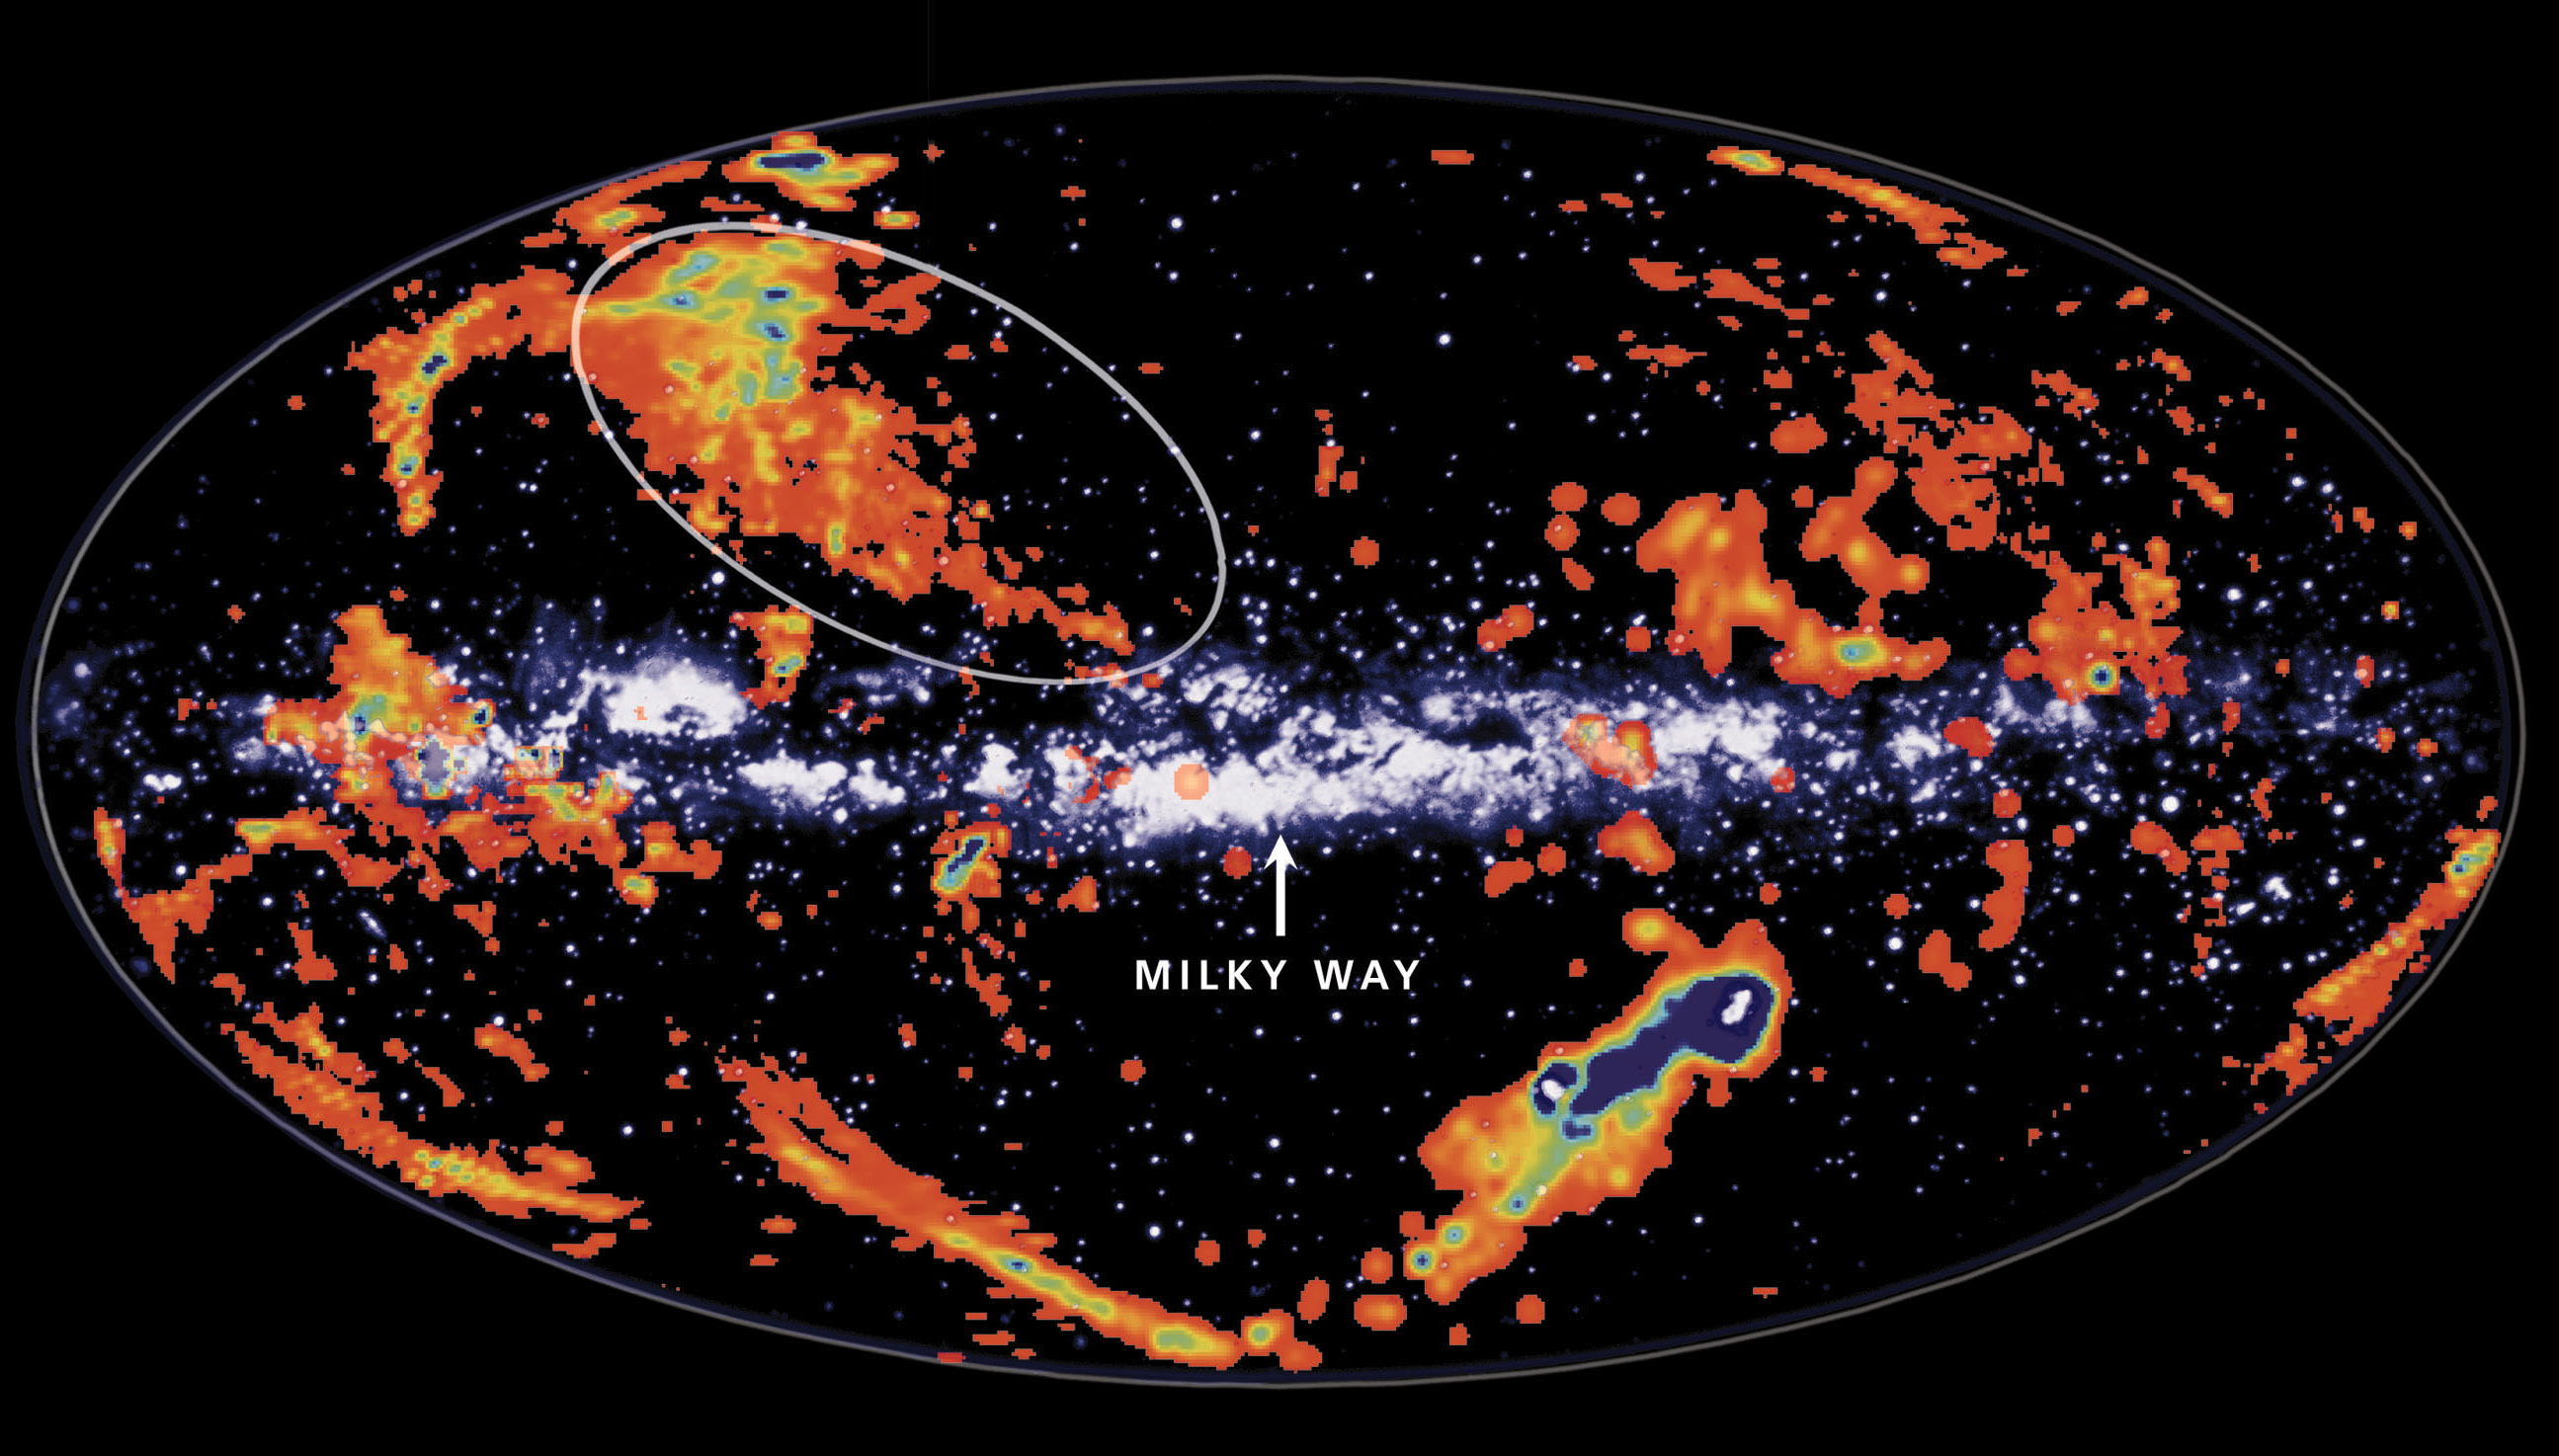

Gas clouds raining star stuff onto Milky Way Galaxy

This composite radio light image and rendition of our galaxy as seen in visible light shows enigmatic 'high-velocity clouds' of gas high above the plane of the Milky Way which rain gas into the galaxy, seeding it with the stuff of stars.

The cloud outlined, and possibly others too, is now known to have low heavy element content and to be raining down onto the Milky Way disk, seeding it with material for star birth. Identifying this infalling gas helps in solving a long-standing mystery of galactic evolution by revealing a source of the low-metallicity gas required to explain the observed chemical composition of stars near the Sun.

Credit: Image composite by Ingrid Kallick of Possible Designs, Madison Wisconsin. The background Milky Way image is a drawing made at Lund Observatory. High-velocity clouds are from the survey done at Dwingeloo Observatory (Hulsbosch & Wakker, 1988)